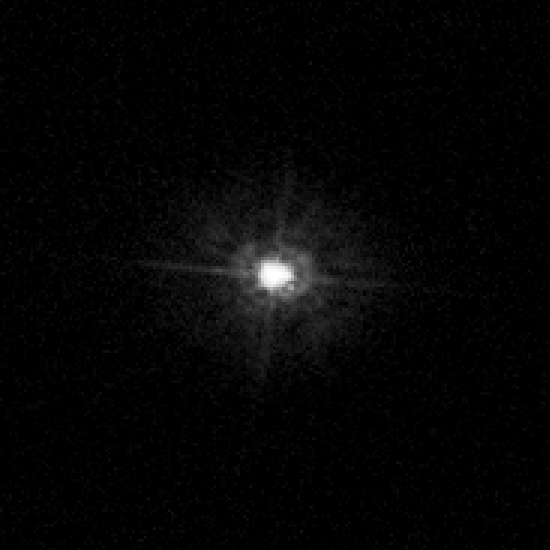

Polaris A and Polaris Ab

By stretching the capabilities of NASA's Hubble Space Telescope to the limit, astronomers have photographed the close companion of Polaris for the first time.

Credit: NASA, ESA, N. Evans (Harvard-Smithsonian CfA), and H. Bond (STScI)